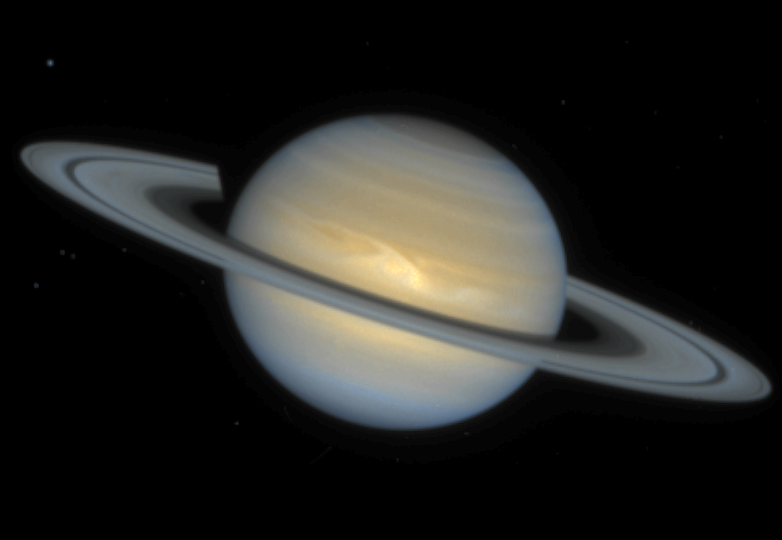

Yet Another Storm on Saturn

This Hubble Space Telescope image of the ringed planet Saturn shows a rare storm that appears as a white arrowhead-shaped feature near the planet's equator. The storm is generated by an upwelling of warmer air, similar to a terrestrial thunderhead. The east-west extent of this storm is equal to the diameter of the Earth (about 12700 kilometres). Hubble provides new details about the effects of Saturn's prevailing winds on the storm. The new image shows that the storm's motion and size have changed little since its discovery in September, 1994.

Credit: Reta Beebe (New Mexico State University), D. Gilmore, L. Bergeron (STScI), and NASA/ESA